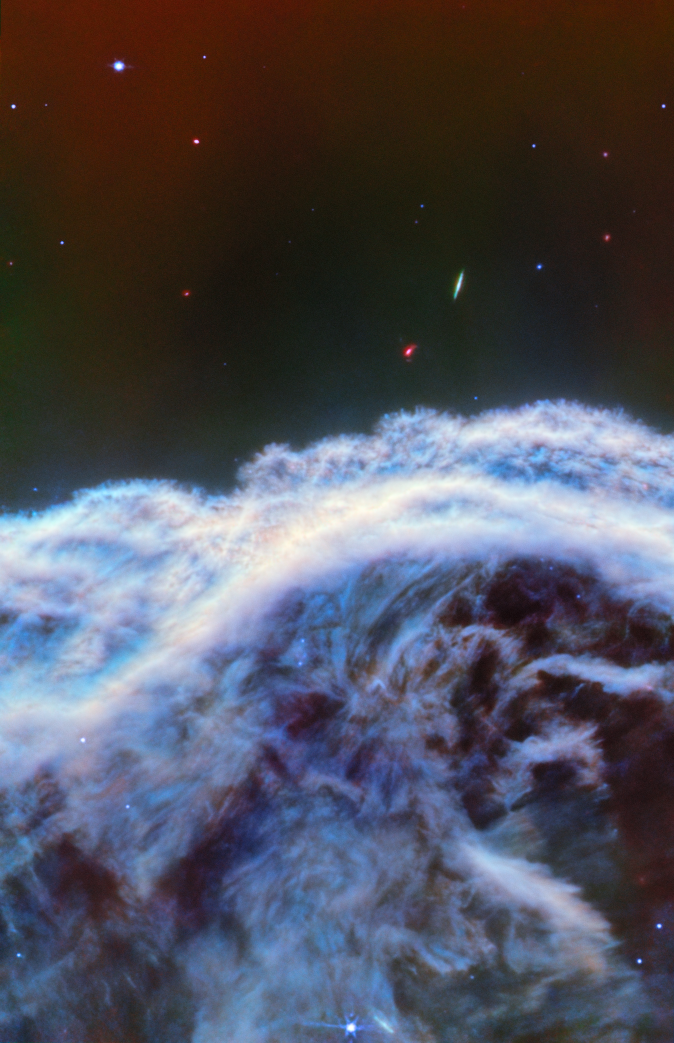

Horsehead Nebula (MIRI image)

The NASA/ESA/CSA James Webb Space Telescope has captured the sharpest infrared images to date of one of the most distinctive objects in our skies, the Horsehead Nebula. These observations show a part of the iconic nebula in a whole new light, capturing its complexity with unprecedented spatial resolution.

Webb’s new images show part of the sky in the constellation Orion (The Hunter), in the western side of the Orion B molecular cloud. Rising from turbulent waves of dust and gas is the Horsehead Nebula, otherwise known as Barnard 33, which resides roughly 1300 light-years away.

The nebula formed from a collapsing interstellar cloud of material, and glows because it is illuminated by a nearby hot star. The gas clouds surrounding the Horsehead have already dissipated, but the jutting pillar is made of thick clumps of material that is harder to erode. Astronomers estimate that the Horsehead has about five million years left before it too disintegrates. Webb’s new view focuses on the illuminated edge of the top of the nebula’s distinctive dust and gas structure.

The Horsehead Nebula is a well-known photon-dominated region, or PDR. In such a region ultraviolet light from young, massive stars creates a mostly neutral, warm area of gas and dust between the fully ionised gas surrounding the massive stars and the clouds in which they are born. This ultraviolet radiation strongly influences the gas chemistry of these regions and acts as the most important source of heat.

These regions occur where interstellar gas is dense enough to remain neutral, but not dense enough to prevent the penetration of far-ultraviolet light from massive stars. The light emitted from such PDRs provides a unique tool to study the physical and chemical processes that drive the evolution of interstellar matter in our galaxy, and throughout the Universe from the early era of vigorous star formation to the present day.

Owing to its proximity and its nearly edge-on geometry, the Horsehead Nebula is an ideal target for astronomers to study the physical structures of PDRs and the evolution of the chemical characteristics of the gas and dust within their respective environments, and the transition regions between them. It is considered one of the best objects in the sky to study how radiation interacts with interstellar matter.

This image was captured with Webb’s MIRI (Mid-InfraRed Instrument).

Credit: ESA/Webb, NASA, CSA, K. Misselt (University of Arizona) and A. Abergel (IAS/University Paris-Saclay, CNRS)